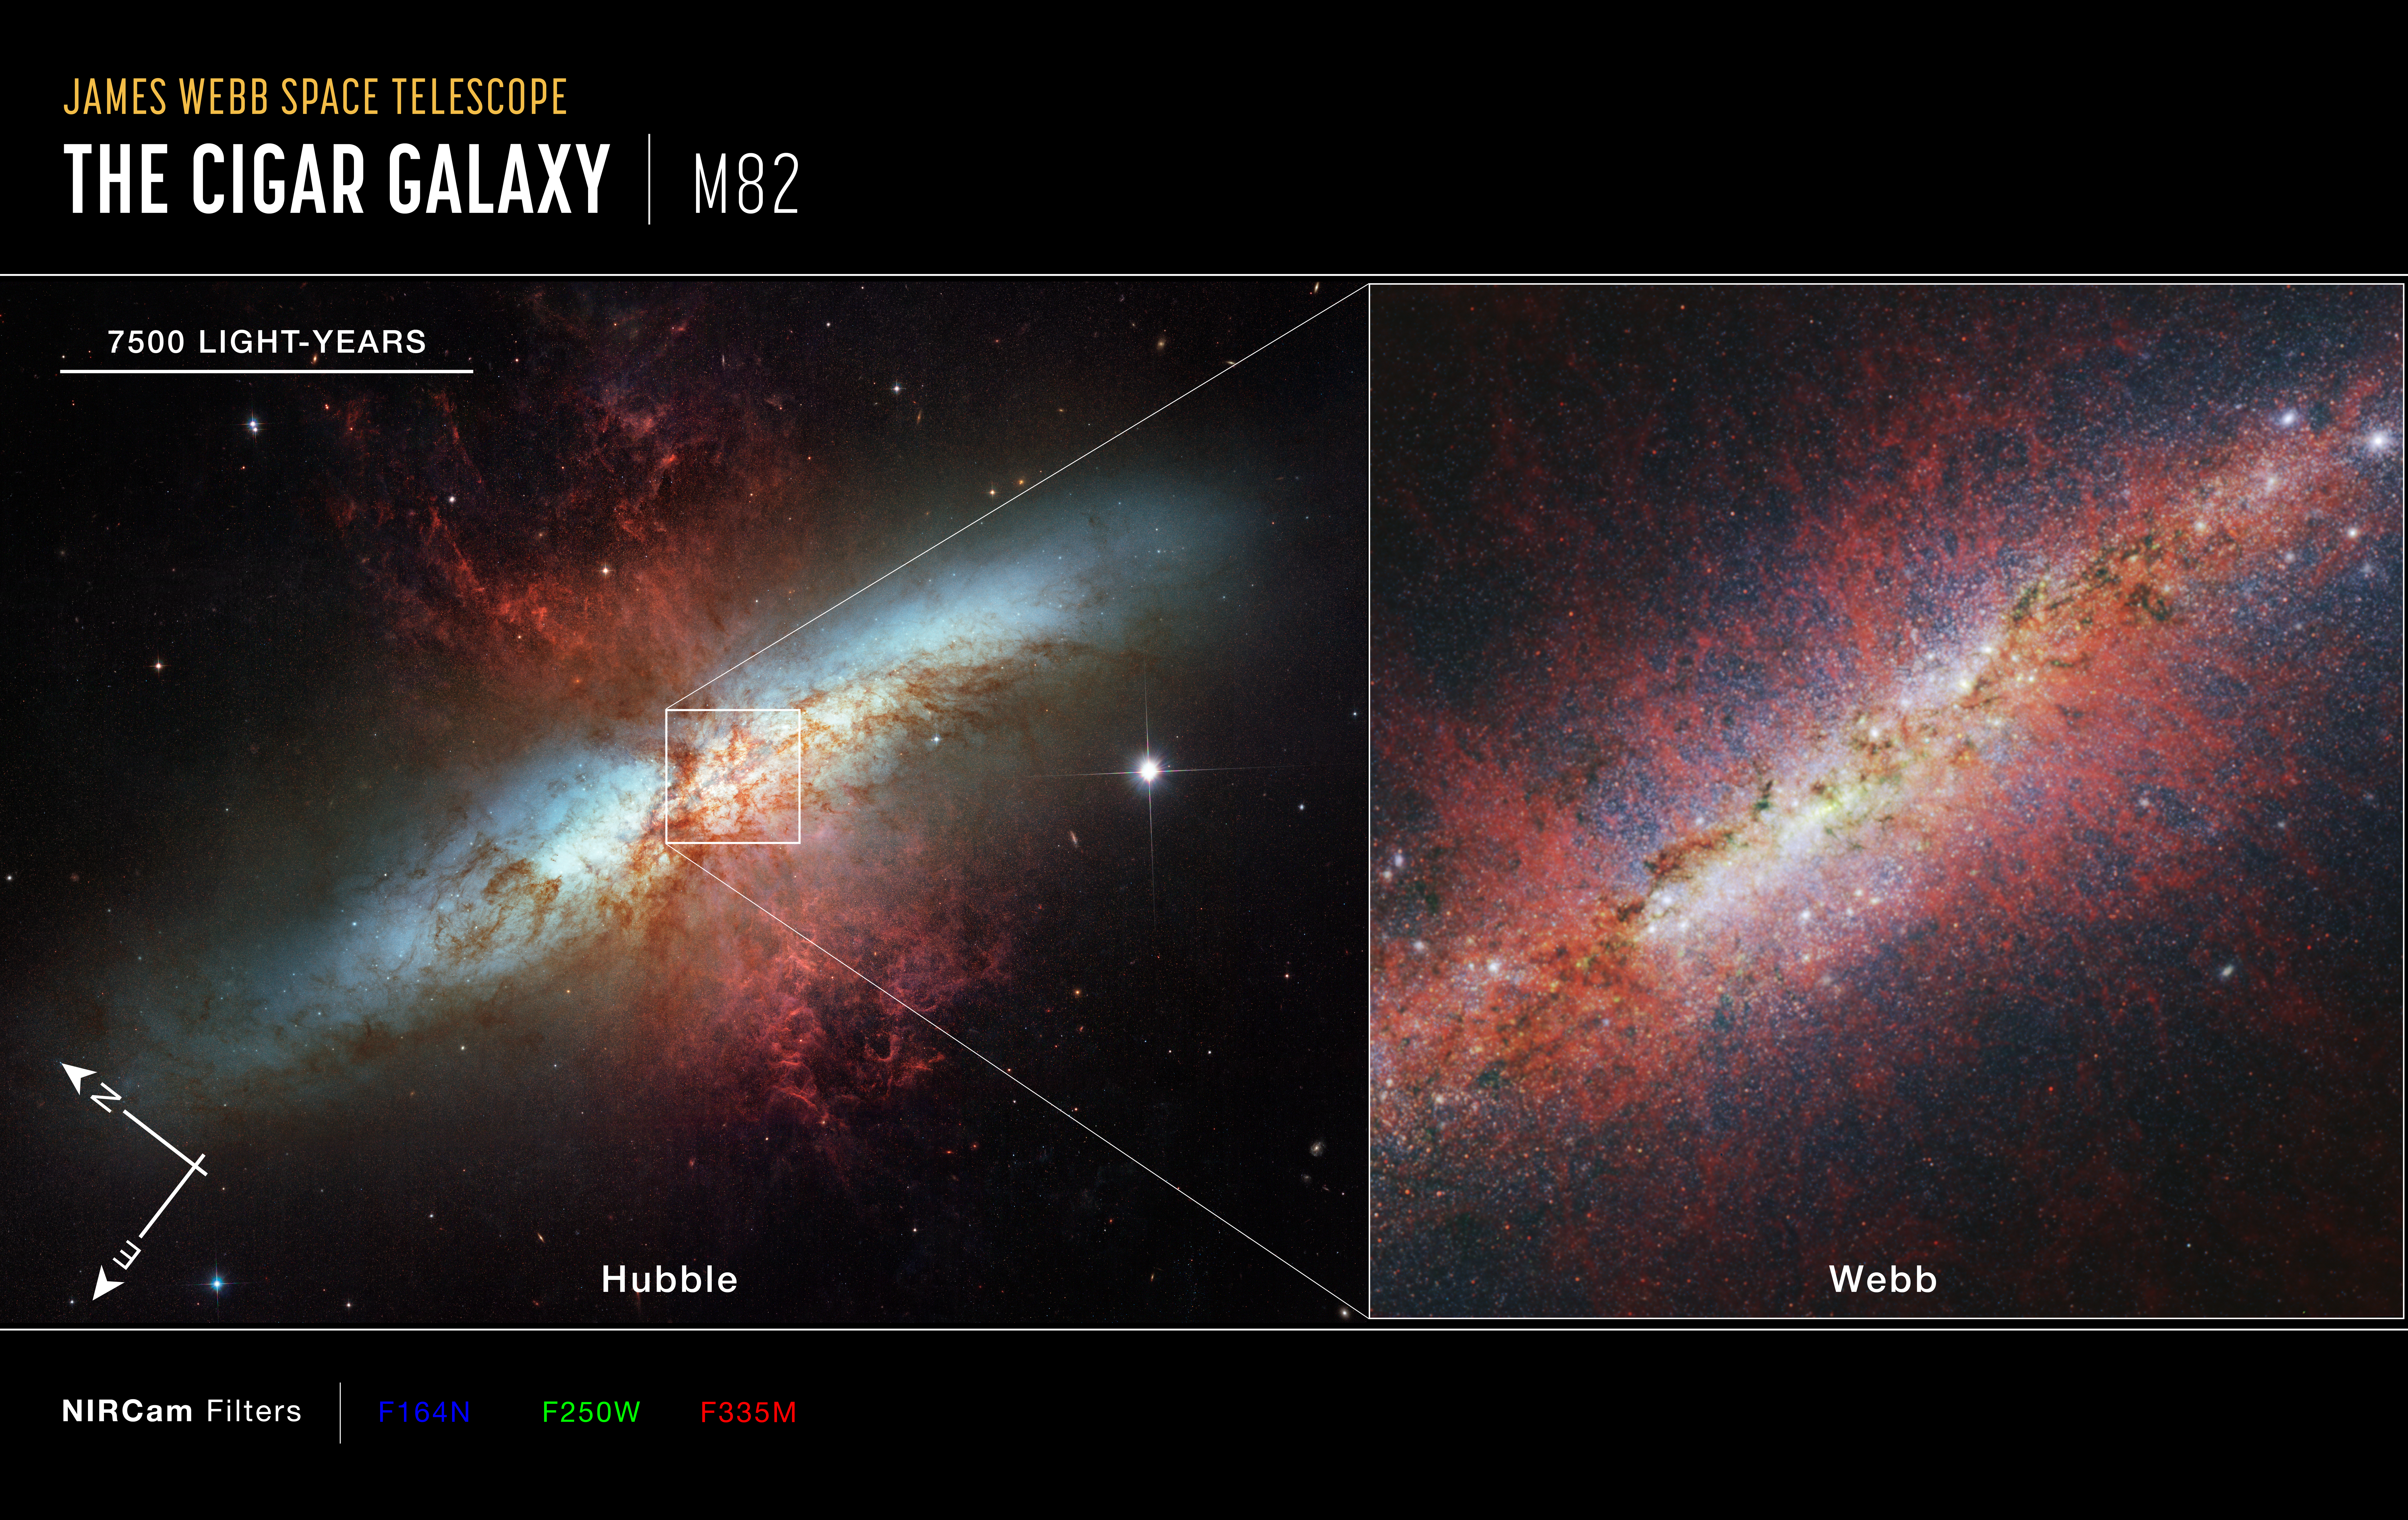

M82 (Webb and Hubble images)

The starburst galaxy M82 was observed by the NASA/ESA Hubble Space Telescope in 2006, which showed the galaxy’s edge-on spiral disc, shredded clouds, and hot hydrogen gas. The NASA/ESA/CSA James Webb Space Telescope has observed M82’s core, capturing in unprecedented detail the structure of the galactic wind and characterising individual stars and star clusters.

The Webb image is from the telescope’s NIRCam (Near-Infrared Camera) instrument. The red filaments trace the shape of the cool component of the galactic wind via polycyclic aromatic hydrocarbons (PAHs). PAHs are very small dust grains that survive in cooler temperatures but are destroyed in hot conditions. The structure of the emission is similar to that of the ionised gas, suggesting PAHs may be replenished from cooler molecular material as it is ionised.

Credit: NASA, ESA, CSA, STScI, A. Bolatto (UMD)